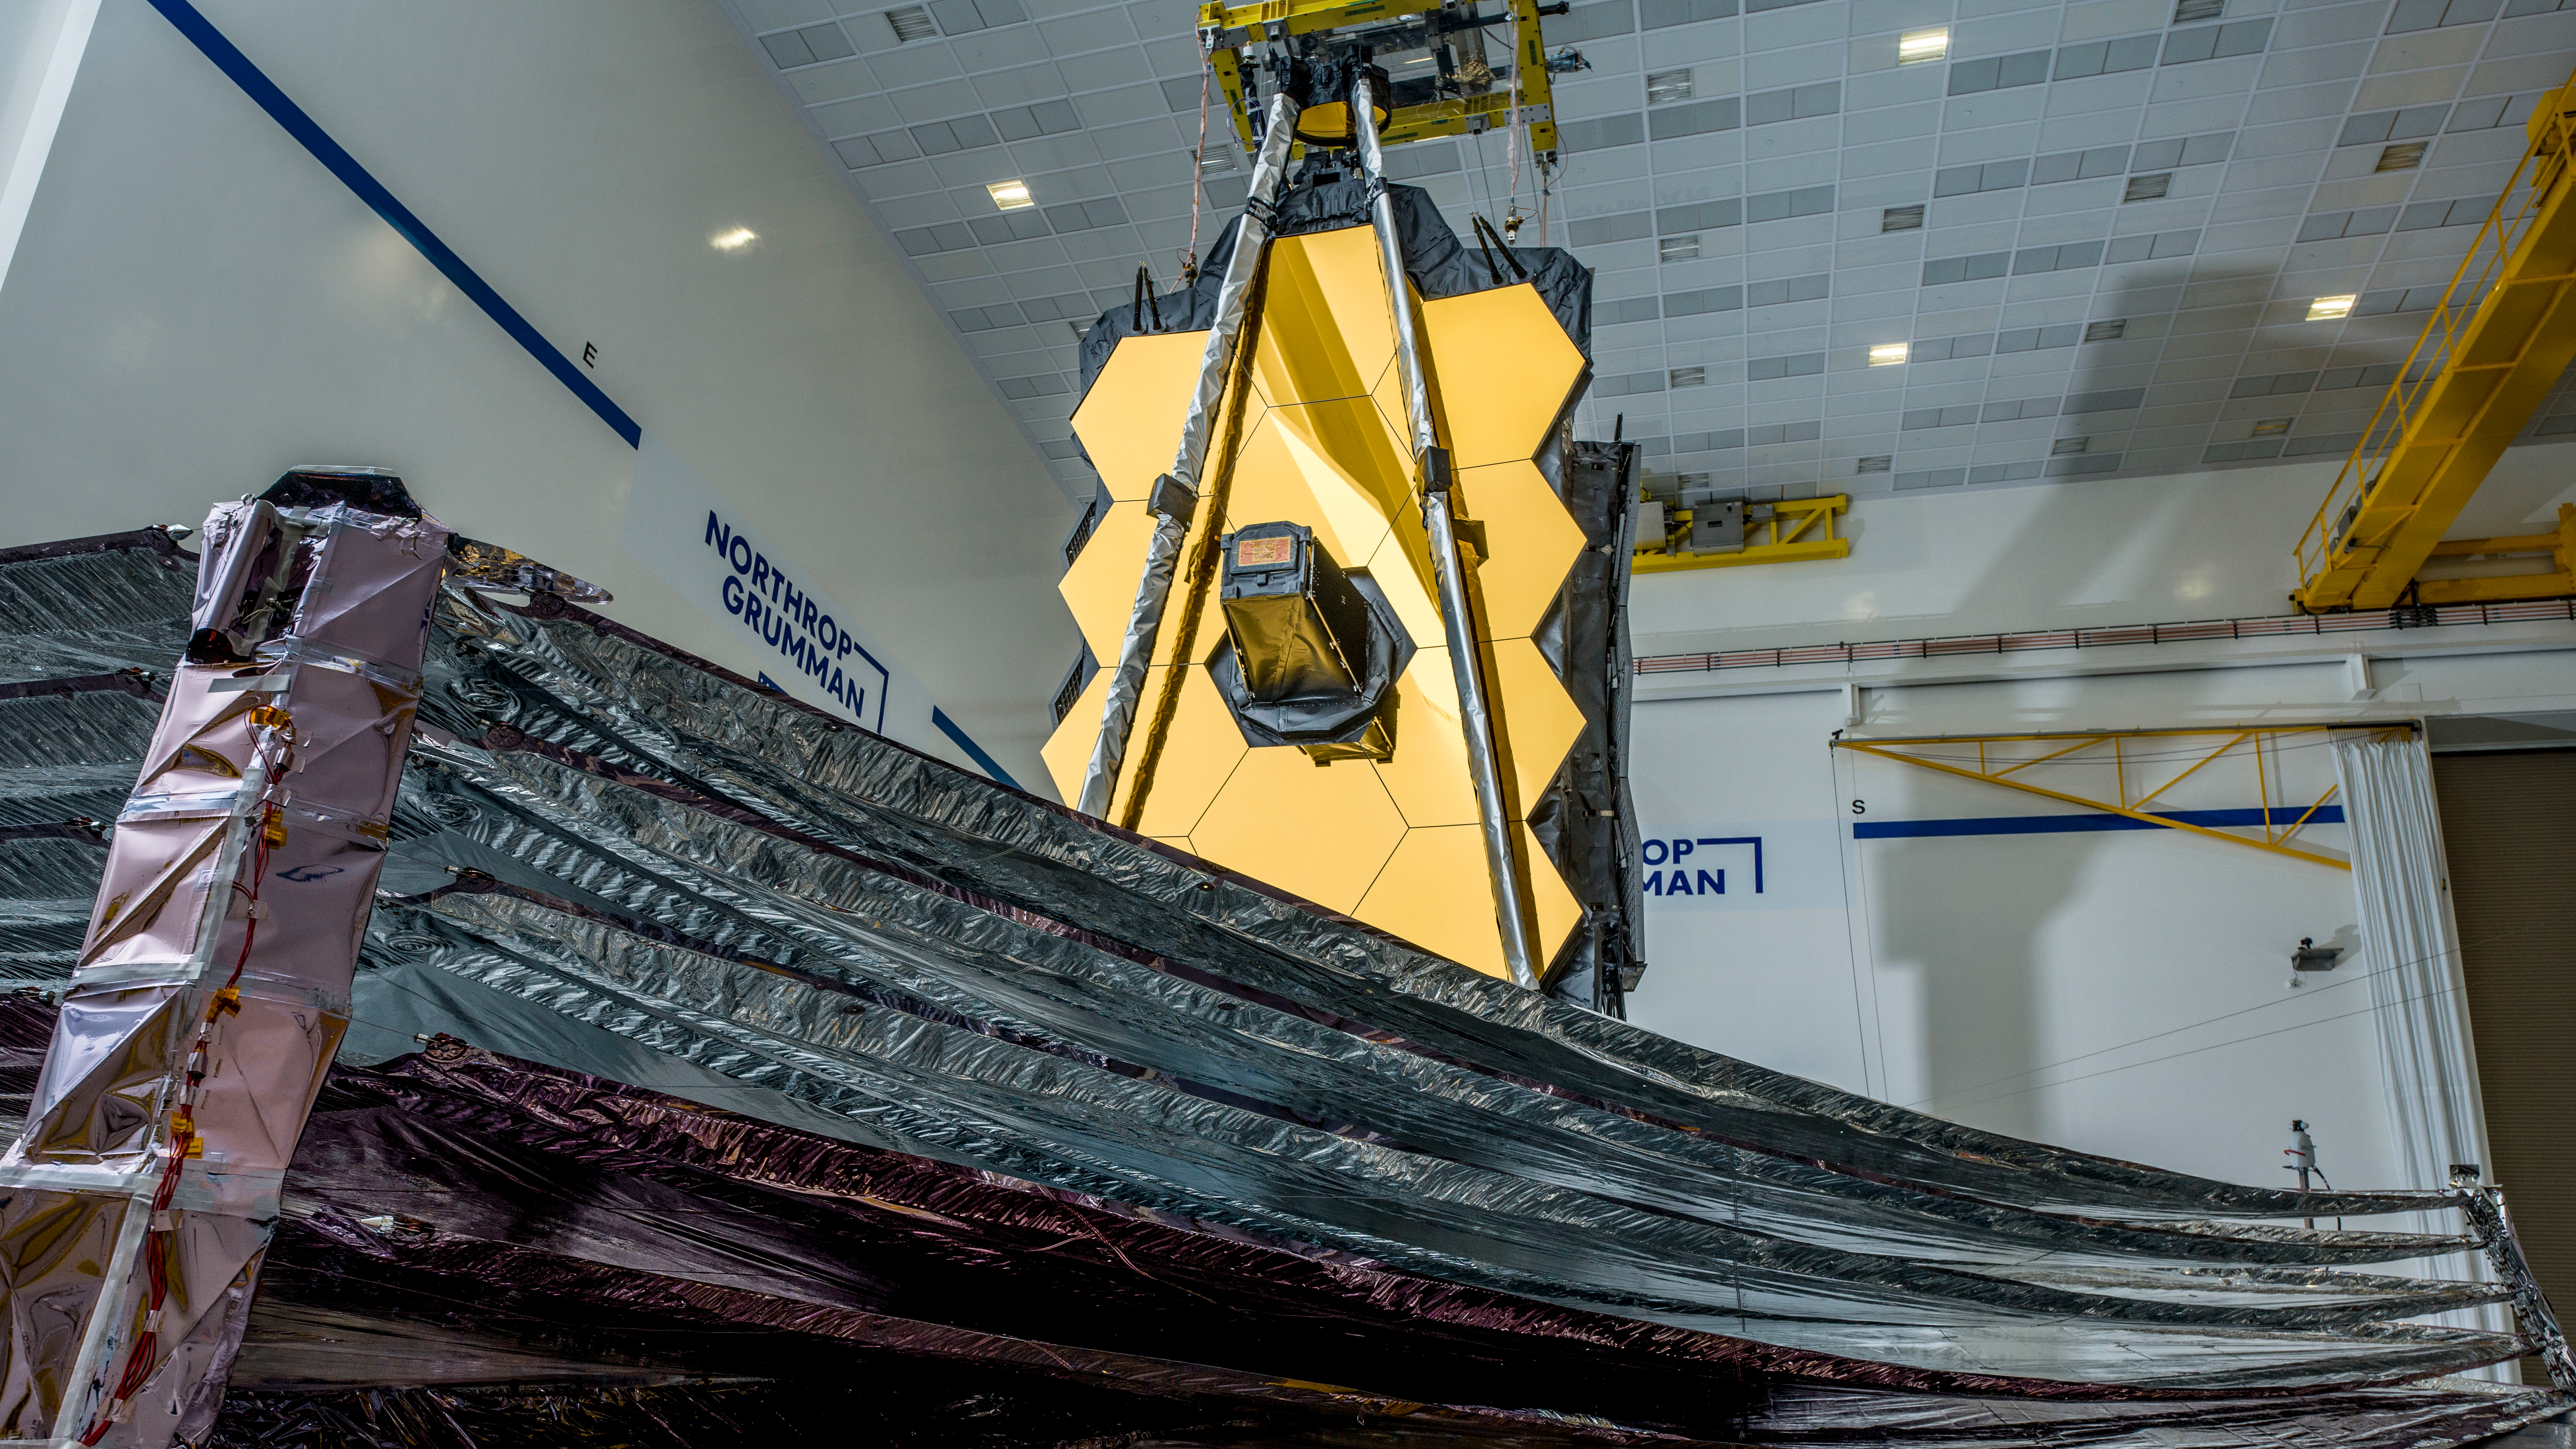

Webb in the Northrop Grumman cleanroom

With the conclusion of the year just days away, we are excited to announce #NASAWebb has cleared one of its most important testing milestones to date. Webb’s 5-layer sunshield has been successfully deployed and tensioned into the same configuration it will have once in space!

Read more here: go.nasa.gov/2KAESkU

Webb is now in its final series of deployment and checkout tests before the observatory is packed for shipment to French Guiana for launch aboard an @ArianeGroup Ariane V rocket. These tests will verify that Webb will deploy perfectly in space after its launch.

Credit: NASA/Chris Gunn